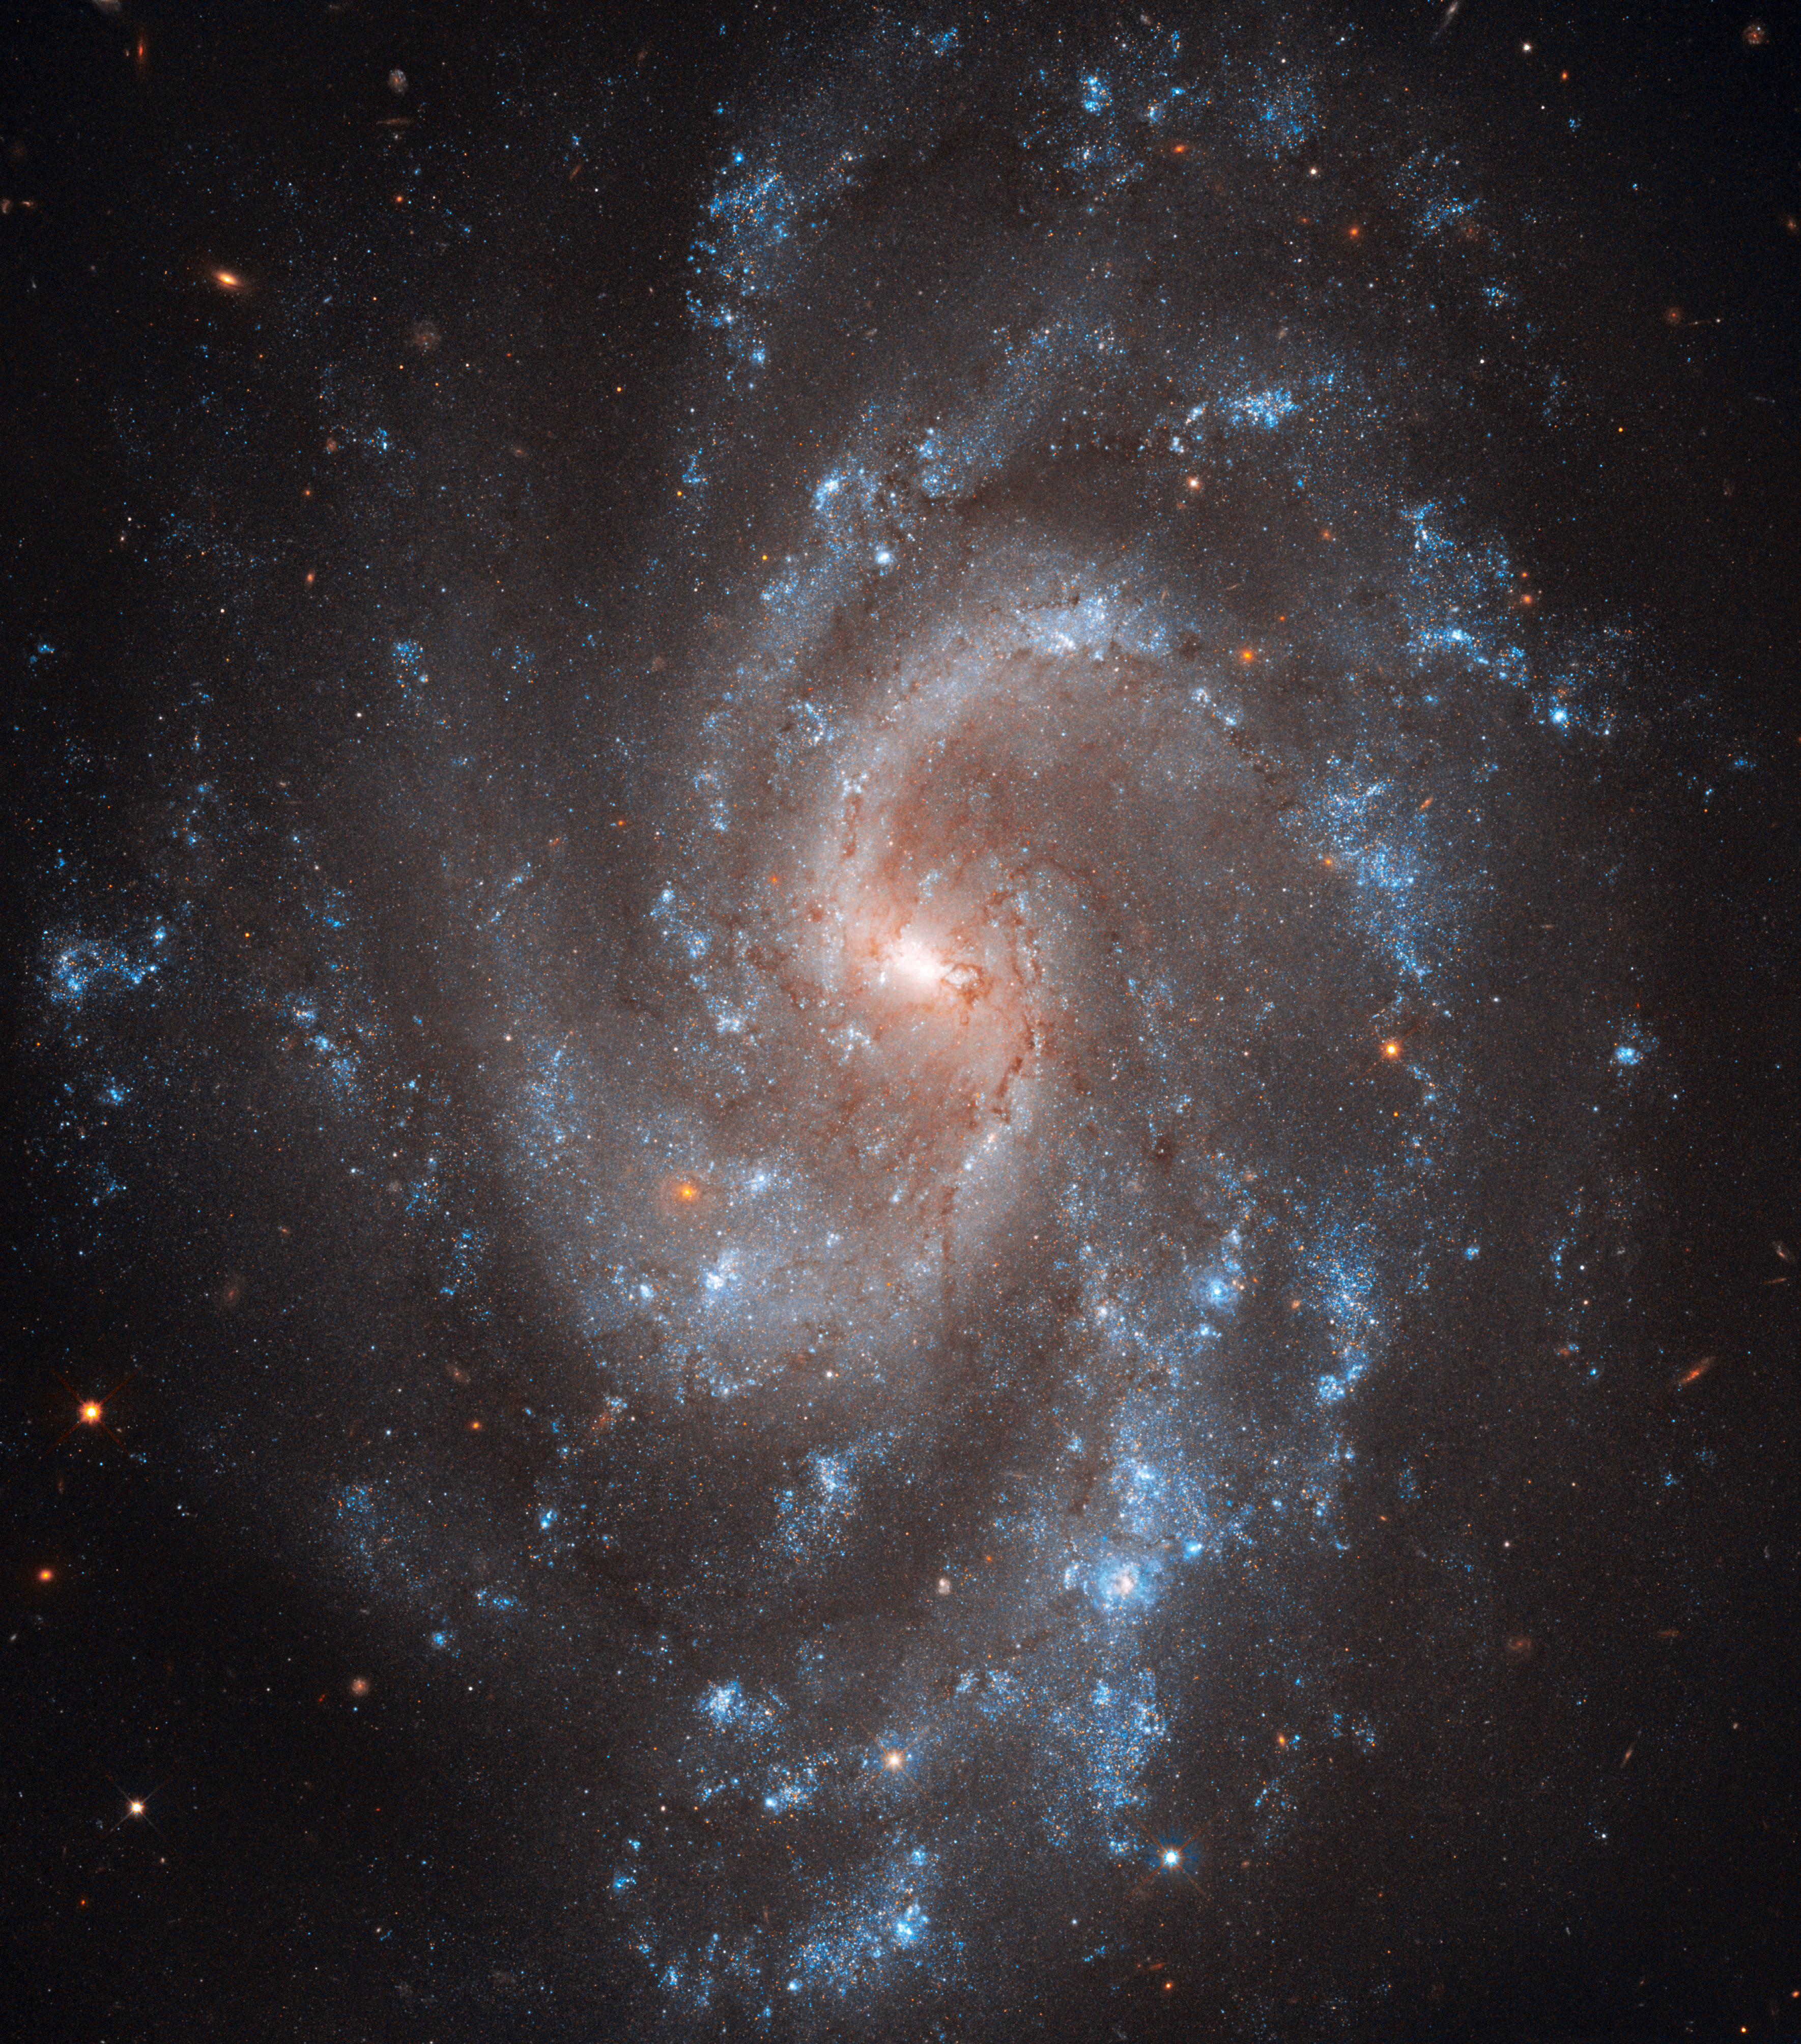

Spiral key to Universe's expansion

This view from the NASA/ESA Hubble Space Telescope shows the beautiful spiral galaxy NGC 5584. This galaxy has played a key role in a new study that measures the expansion rate of the Universe to greater accuracy than ever before.

NGC 5584 was first spotted as a faint glow in the constellation of Virgo by the great visual observer E. E. Barnard, back in 1881, using just a 12.5-cm telescope. But, by bringing the power of Hubble to bear, the galaxy can be resolved into thousands of separate stars. Some of these stars vary in brightness and are classified as Cepheids. These are brilliant pulsating stars with a remarkable property — once the time it takes a Cepheid to brighten and fade is known, then it is possible to find how bright it actually is. When this information is combined with a measurement of how bright the star appears it is easy to work out how far away the star actually lies. This method is the most accurate and effective way to measure the distances to most nearby galaxies.

This trick has now been used as part of a major new study of the expansion rate of the Universe, led by Adam Riess at the Space Telescope Science Institute in Baltimore. By studying many Cepheids in several galaxies the team has been able to refine our knowledge of this expansion rate, expressed as a number known as Hubble’s constant, to an accuracy of 3.3 percent.

In addition to many Cepheids NGC 5584 was also recently the site of a type Ia supernova. These dramatic explosions of white dwarf stars are used as reference beacons for mapping the expansion, and acceleration, of the more remote Universe so this galaxy is a very valuable link between the two distance scales.

More details of this major study, and its significance for the understanding of dark energy, can be found in a press release from NASA: https://hubblesite.org/contents/news-releases/2011/news-2011-08.html.

This picture was created from many exposures taken with Hubble’s Wide Field Channel 3. Images through three filters have been combined to create this composite picture. Light detected through a filter that transmits most visible light (F350LP) is coloured white, light coming through a yellow/green filter (F555W) is coloured blue and near infrared light (the F814W filter) is coloured red. The field of view 2.4 arcminutes across and the total exposure time was 20.8 hours.

Credit: NASA, ESA, A. Riess (STScI/JHU), L. Macri (Texas A & M University), and the Hubble Heritage Team (STScI/AURA)